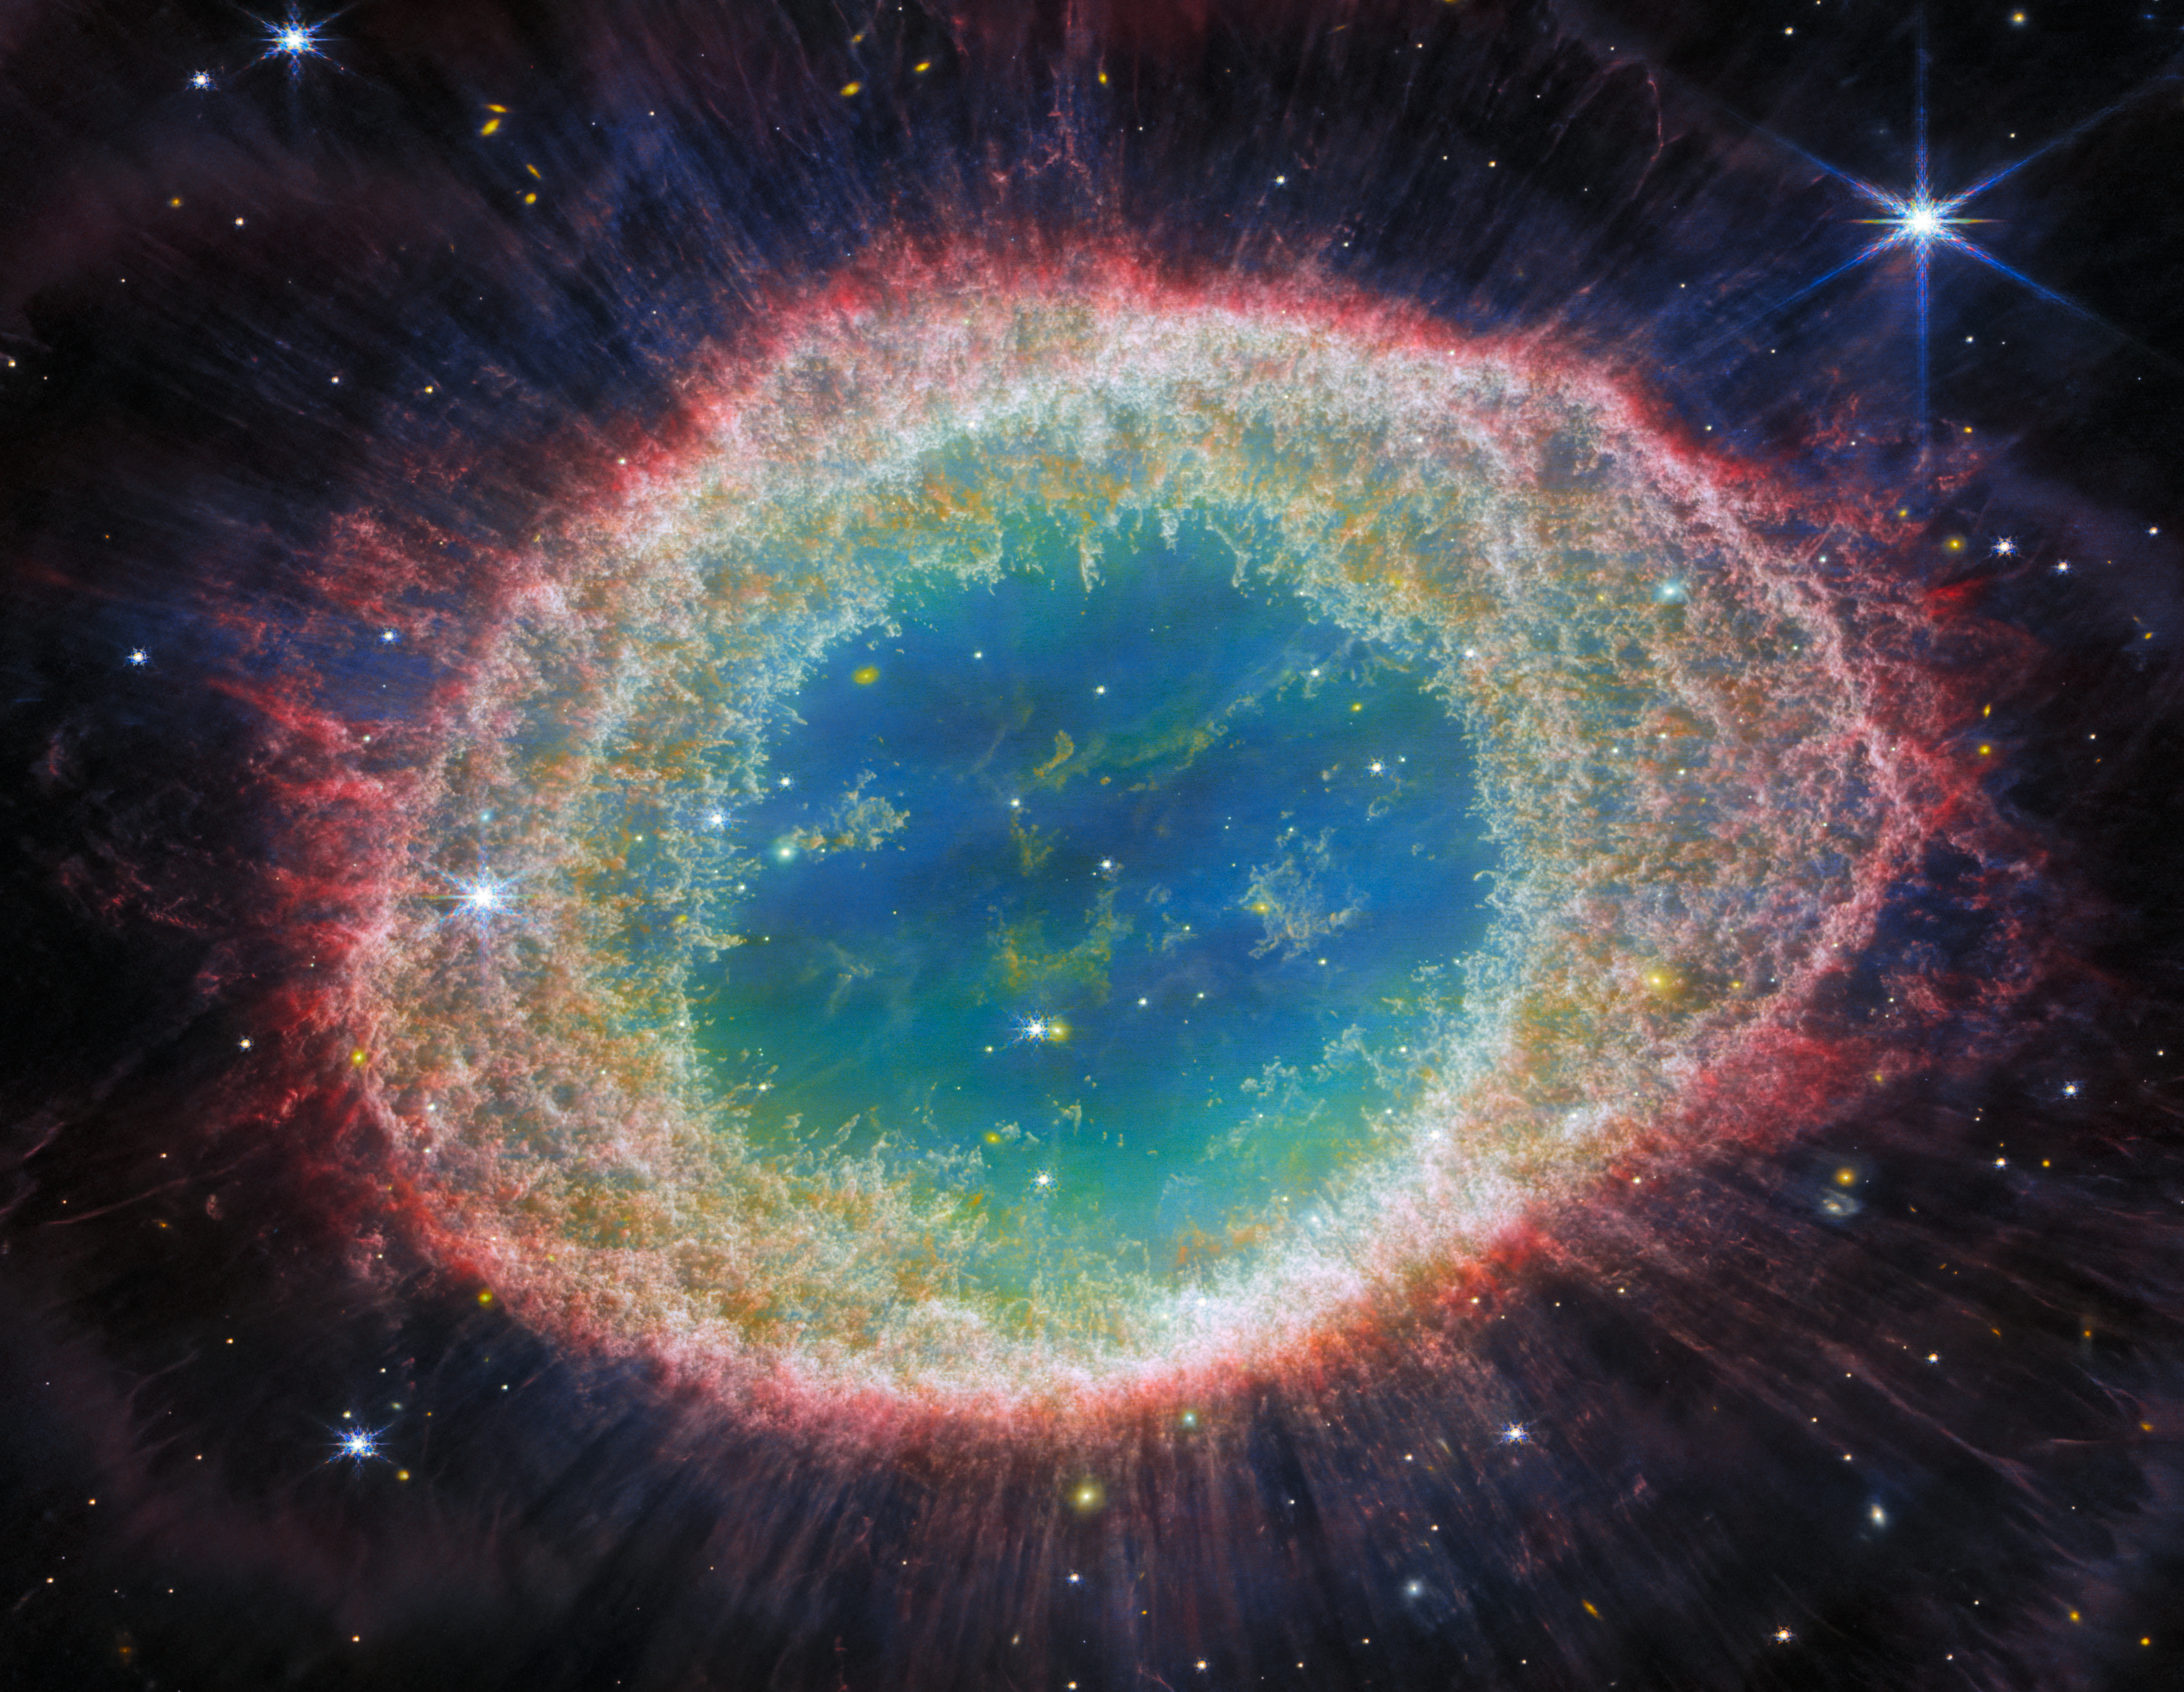

Webb captures detailed beauty of Ring Nebula (NIRCam image - cropped)

The NASA/ESA/CSA James Webb Space Telescope has observed the well-known Ring Nebula with unprecedented detail. Formed by a star throwing off its outer layers as it runs out of fuel, the Ring Nebula is an archetypal planetary nebula. Also known as M57 and NGC 6720, it is both relatively close to Earth at roughly 2,500 light-years away.

This new image provides unprecedented spatial resolution and spectral sensitivity. For example, the intricate details of the filament structure of the inner ring are particularly visible in this dataset.

There are some 20,000 dense globules in the nebula, which are rich in molecular hydrogen. In contrast, the inner region shows very hot gas. The main shell contains a thin ring of enhanced emission from carbon-based molecules known as polycyclic aromatic hydrocarbons (PAHs). Roughly ten concentric arcs are located just beyond the outer edge of the main ring. The arcs are thought to originate from the interaction of the central star with a low-mass companion orbiting at a distance comparable to that between the Earth and the dwarf planet Pluto. In this way, nebulae like the Ring Nebula reveal a kind of astronomical archaeology, as astronomers study the nebula to learn about the star that created it.

Credit: ESA/Webb, NASA, CSA, M. Barlow, N. Cox, R. Wesson